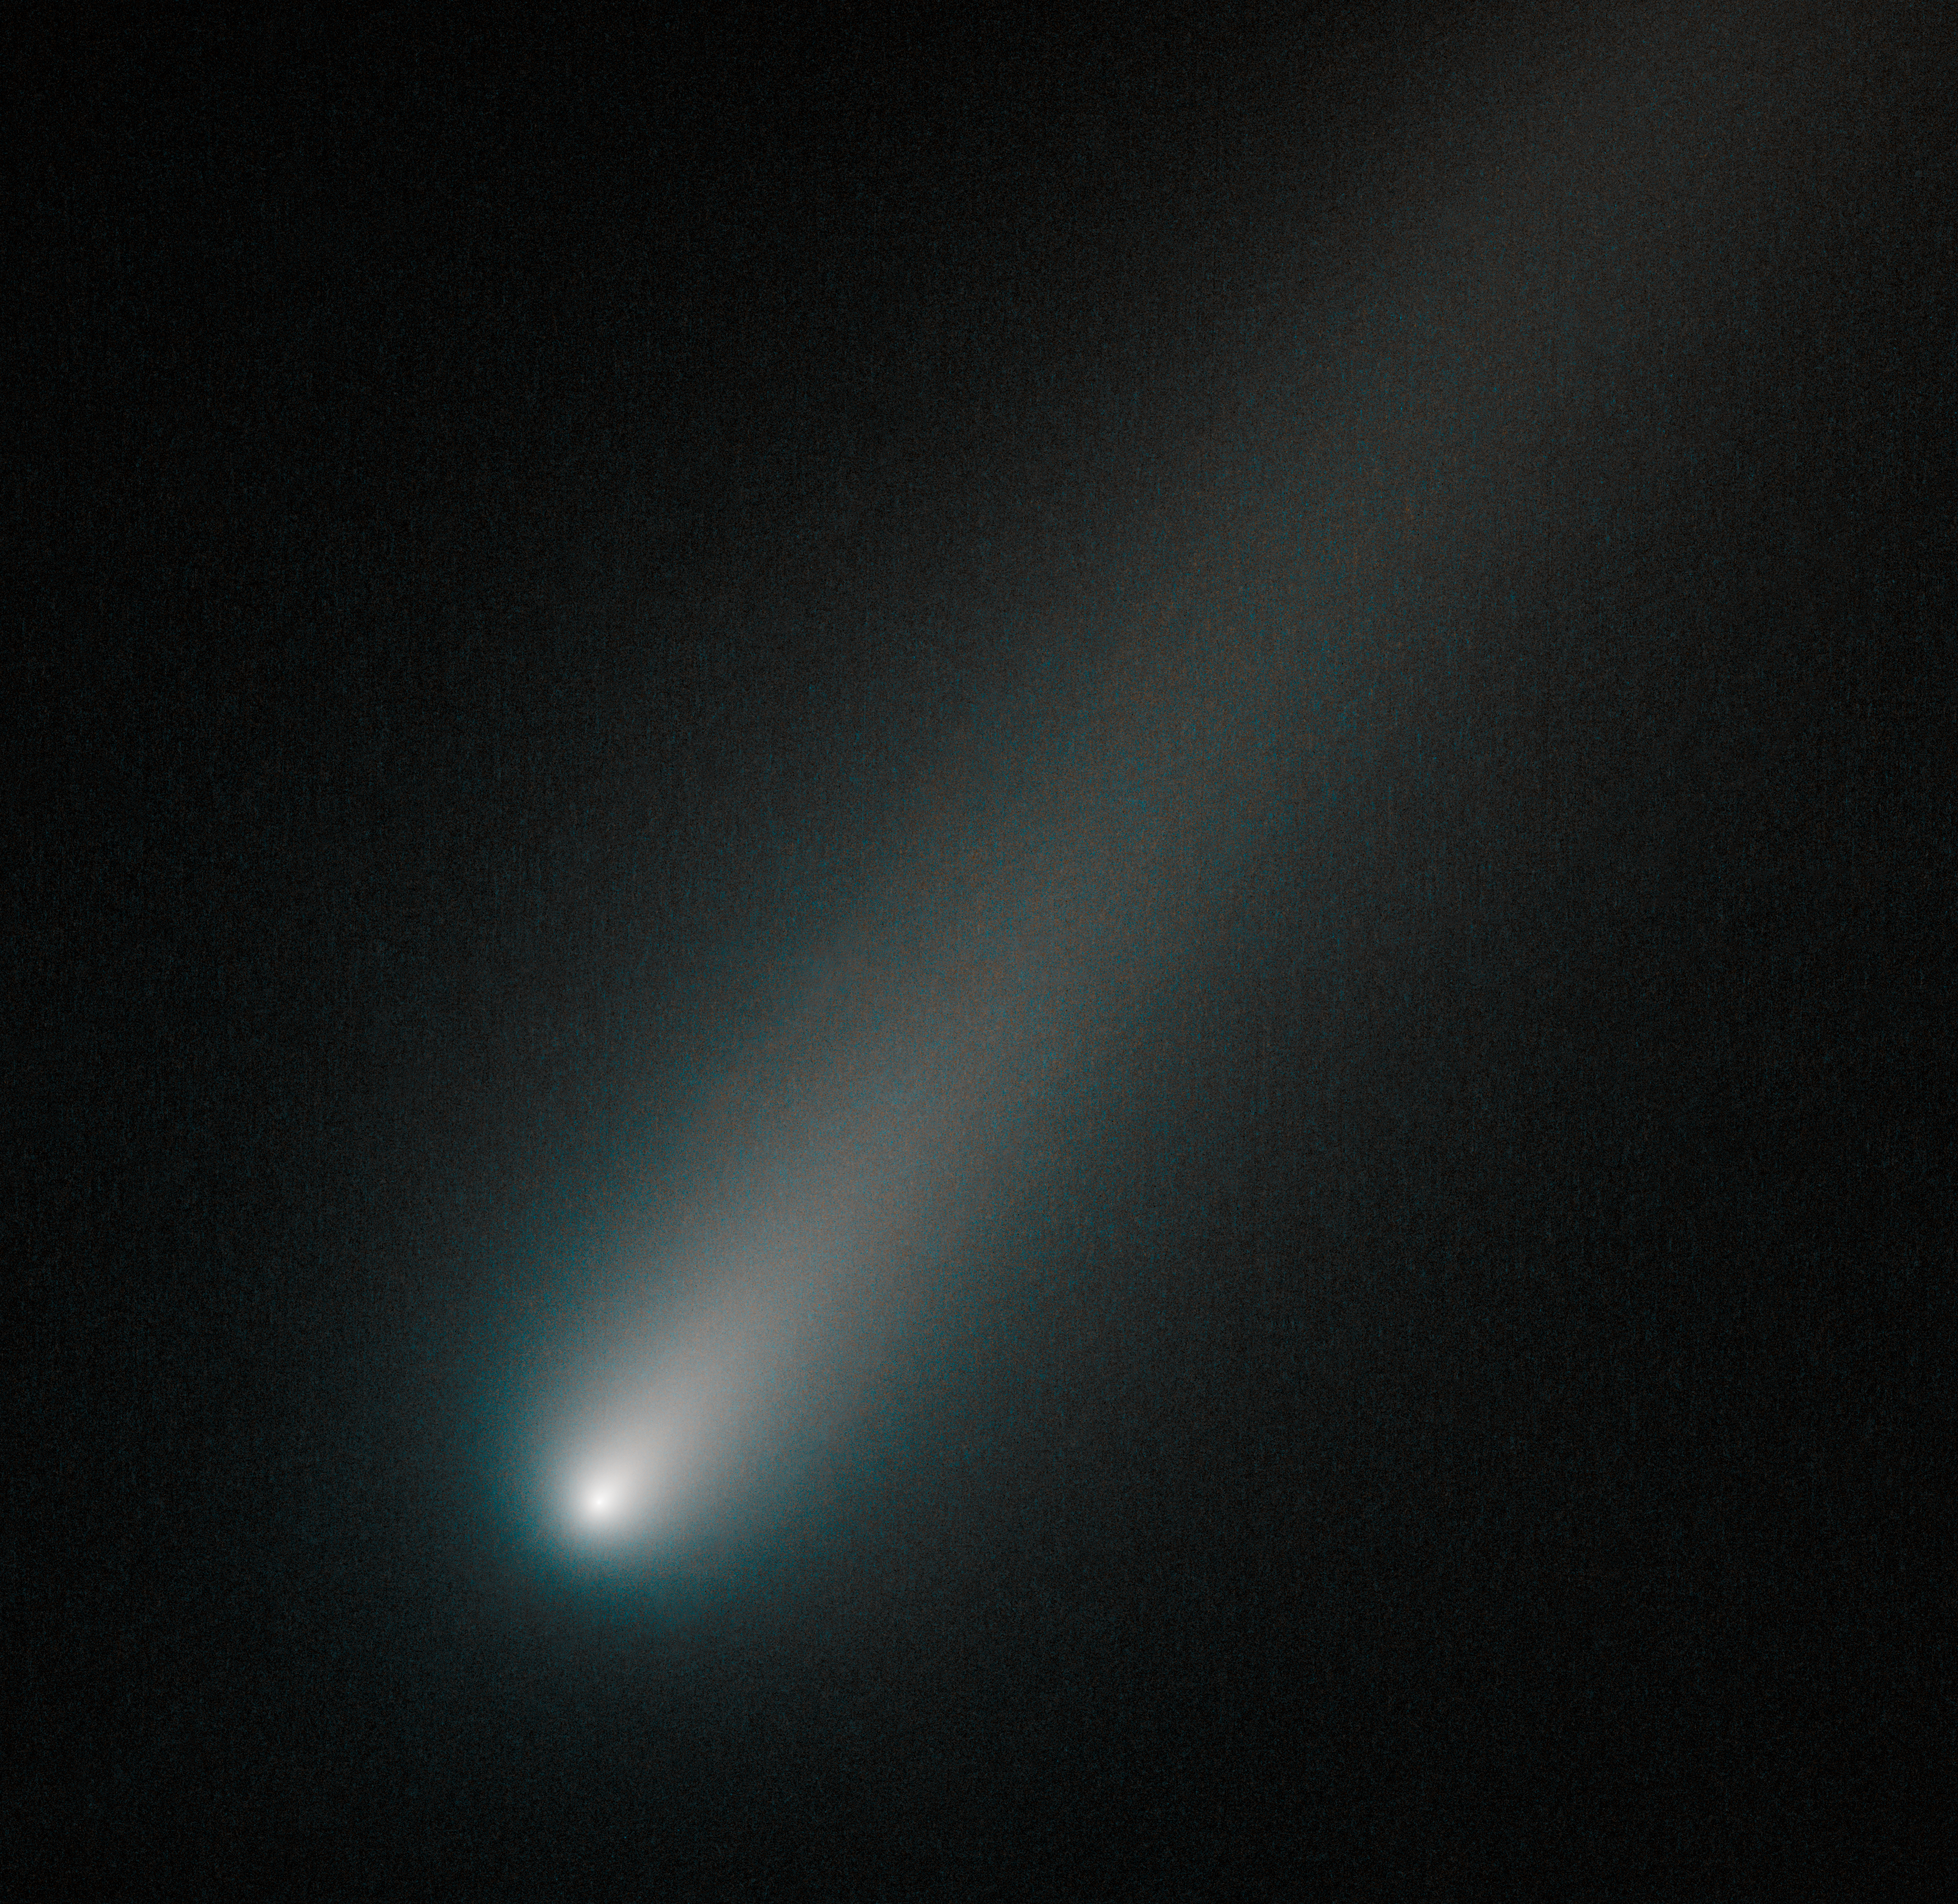

Hubble snaps icy comet ISON

This new NASA/ESA Hubble Space Telescope picture shows C/2012 S1, better known as Comet ISON, a high-profile celestial visitor to the Solar System. Hubble has already snapped this comet twice this year (opo1314a, opo1331a), but for some time it was temporarily blocked from view by the Sun. It was spotted again in August 2013, and this new image shows the comet as it appeared in our skies in early October.

ISON will be brightest in our skies in late November, just before and after it hurtles past the Sun. As it gets brighter, it may even become visible as a naked eye object, before it fades throughout December — the month of its closest approach to Earth. Depending on its fate as it passes close to the Sun, it could become spectacular or, on the contrary, it could completely disintegrate. Many observatories, as well as several ESA and NASA missions, aim to observe this icy visitor over the coming months.

In this Hubble image, taken on 9 October 2013, the comet's solid nucleus is unresolved because it is so small. If it had broken apart — a possibility as the Sun slowly warms it up during its approach — Hubble would have likely seen evidence for multiple fragments instead.

Credit: NASA, ESA, and the Hubble Heritage Team (STScI/AURA)